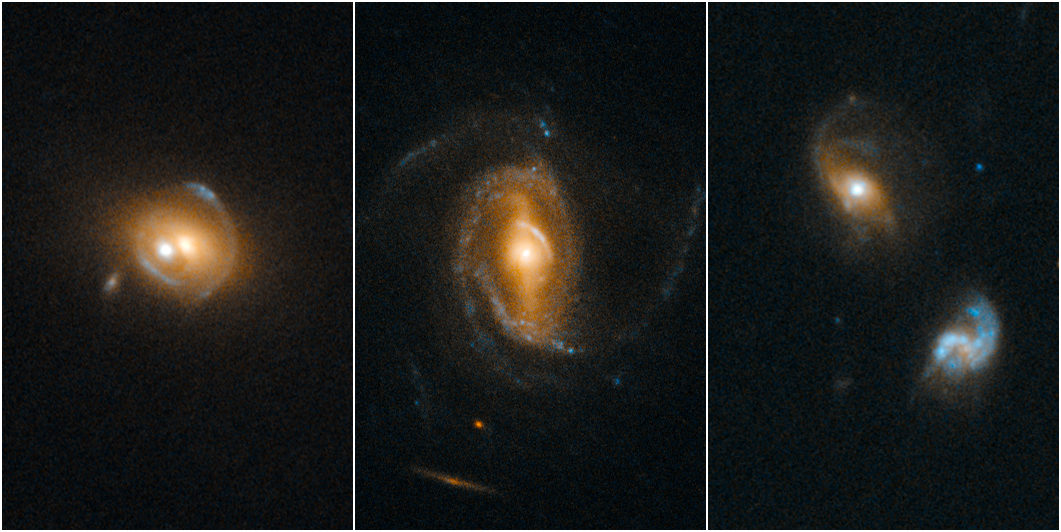

Quasars acting as gravitational lenses

Astronomers using the NASA/ESA Hubble Space Telescope have made images of several galaxies containing quasars, which act as gravitational lenses to amplify and distort images of the galaxies aligned behind them.

Quasars are among the brightest objects in the Universe, far outshining the total output of their host galaxies. They are powered by supermassive black holes, which pull in surrounding material that then heats up as it falls towards the black hole. The path that the light from even more distant galaxies takes on its journey towards us is bent by the enormous masses at the centre of these galaxies. Gravitational lensing is a subtle effect which requires extremely high resolution observations, something for which Hubble is extremely well suited.

To find these rare cases of galaxy–quasar combinations acting as lenses, a team of astronomers led by Frederic Courbin at the Ecole Polytechnique Federale de Lausanne (EPFL, Switzerland) selected 23 000 quasar spectra in the Sloan Digital Sky Survey (SDSS). They looked for the spectral imprint of galaxies at much greater distances that happened to align with foreground galaxies. Once candidates were identified, Hubble’s sharp vision was used to look for the characteristic gravitational arcs and rings that would be produced by gravitational lensing.

In Hubble’s images, the quasars are the bright spots visible at the centre of the galaxies, while the lensed images of distant galaxies are visible as fainter arc-shaped forms that surround them. From left to right, the galaxies are: SDSS J0919+2720, with two bluish lensed images clearly visible above and below the galaxy’s centre; SDSS J1005+4016, with one yellowish arc visible to the right of the galaxy’s centre; and SDSS J0827+5224, with two lensed images very faintly visible, one above and to the right, and one below and to the left of the galaxy’s centre.

Quasar host galaxies are hard or sometimes even impossible to see because the central quasar far outshines the galaxy. Therefore, it is difficult to estimate the mass of a host galaxy based on the collective brightness of its stars. However, gravitational lensing candidates are invaluable for estimating the mass of a quasar’s host galaxy because the amount of distortion in the lens can be used to estimate a galaxy’s mass.

Credit: NASA, ESA/Hubble and F. Courbin (Ecole Polytechnique Federale de Lausanne, Switzerland)